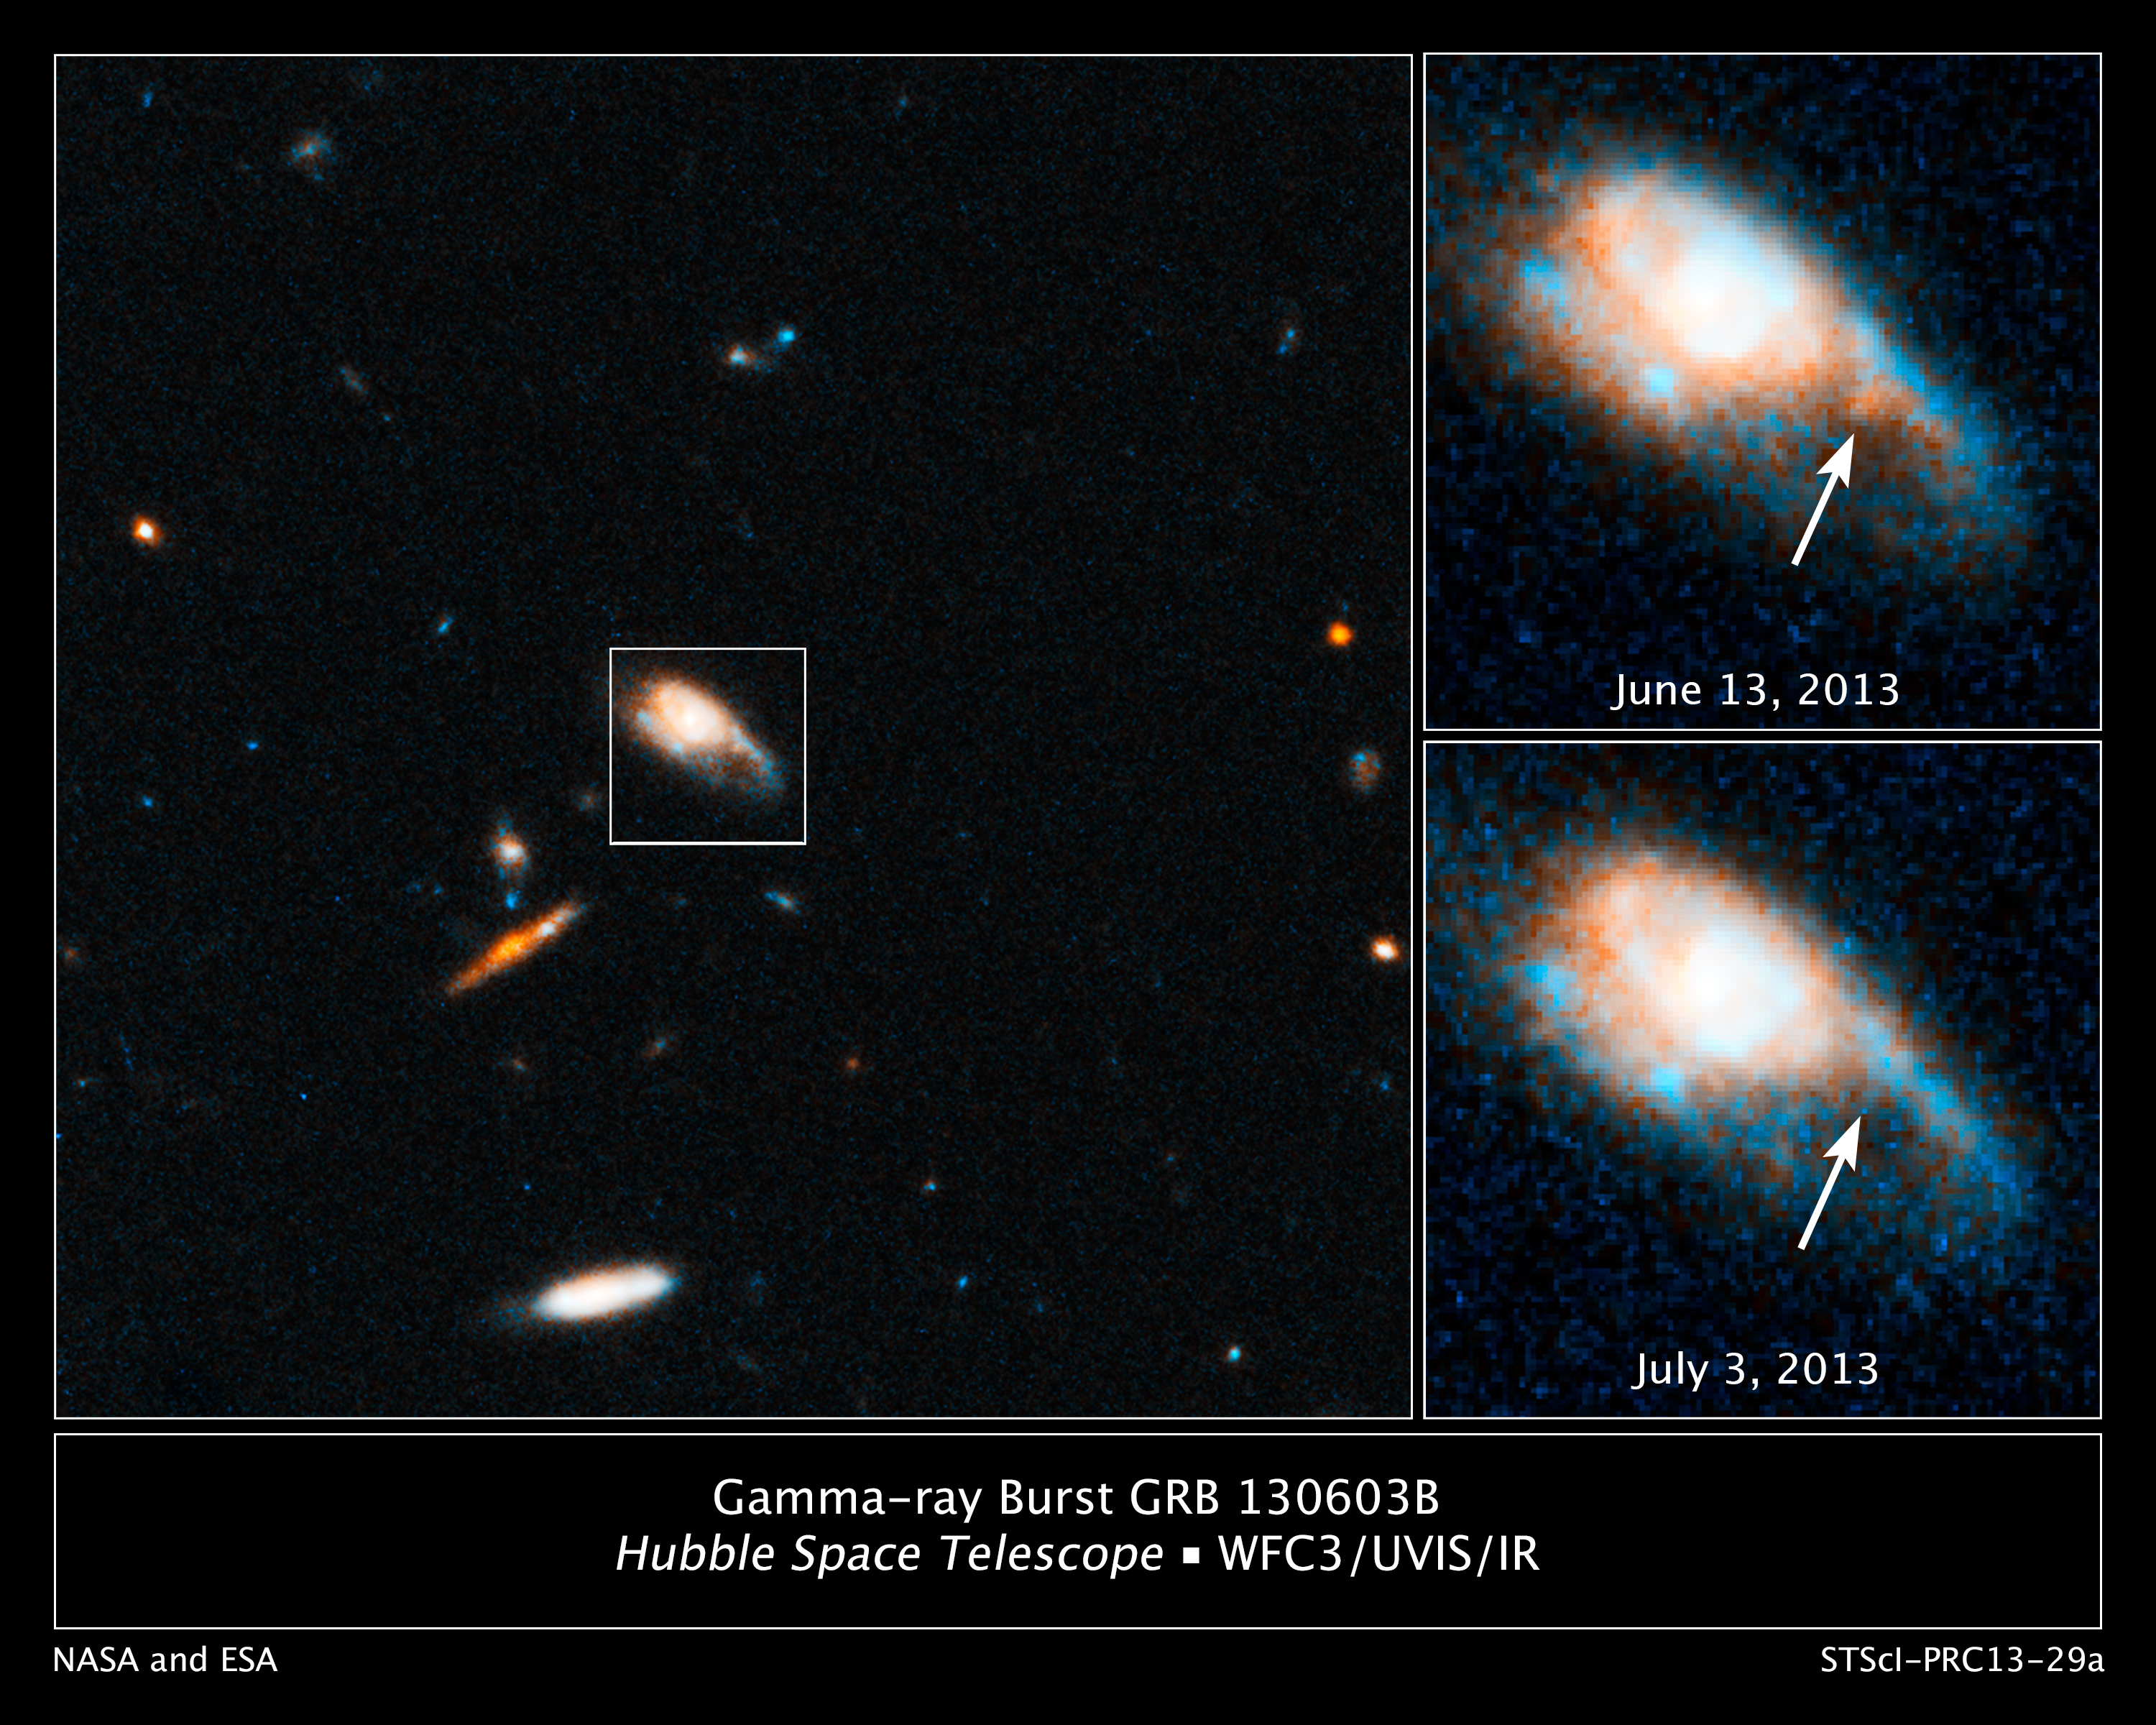

Hubble captures infrared glow of a kilonova blast

These images taken by the NASA/ESA Hubble Space Telescope reveal a new type of stellar explosion produced from the merger of two compact objects.

Hubble spotted the outburst while looking at the aftermath of a short-duration gamma-ray burst, a mysterious flash of intense high-energy radiation that appears from random directions in space. Short-duration blasts last at most a few seconds. They sometimes, however, produce faint afterglows in visible and near-infrared light that continue for several hours or days and help astronomers to pinpoint the exact location of the burst.

In the image on the left, the galaxy in the centre produced the gamma-ray burst, designated GRB 130603B. A probe of the galaxy with Hubble's Wide Field Camera 3 on June 13, 2013, revealed a glow in near-infrared light at the source of the gamma-ray burst, shown in the top right image. When Hubble observed the same location on July 3, the source had faded, shown in the below right image. The fading glow provided key evidence that it was the decaying fireball of a new type of stellar blast called a "kilonova".

Kilonovas are about 1000 times brighter than a nova, which is caused by the eruption of a white dwarf. But they are 1/10th to 1/100th the brightness of a typical supernova, the self-detonation of a massive star.

Credit: NASA, ESA, N. Tanvir (University of Leicester), A. Fruchter (STScI), and A. Levan (University of Warwick)